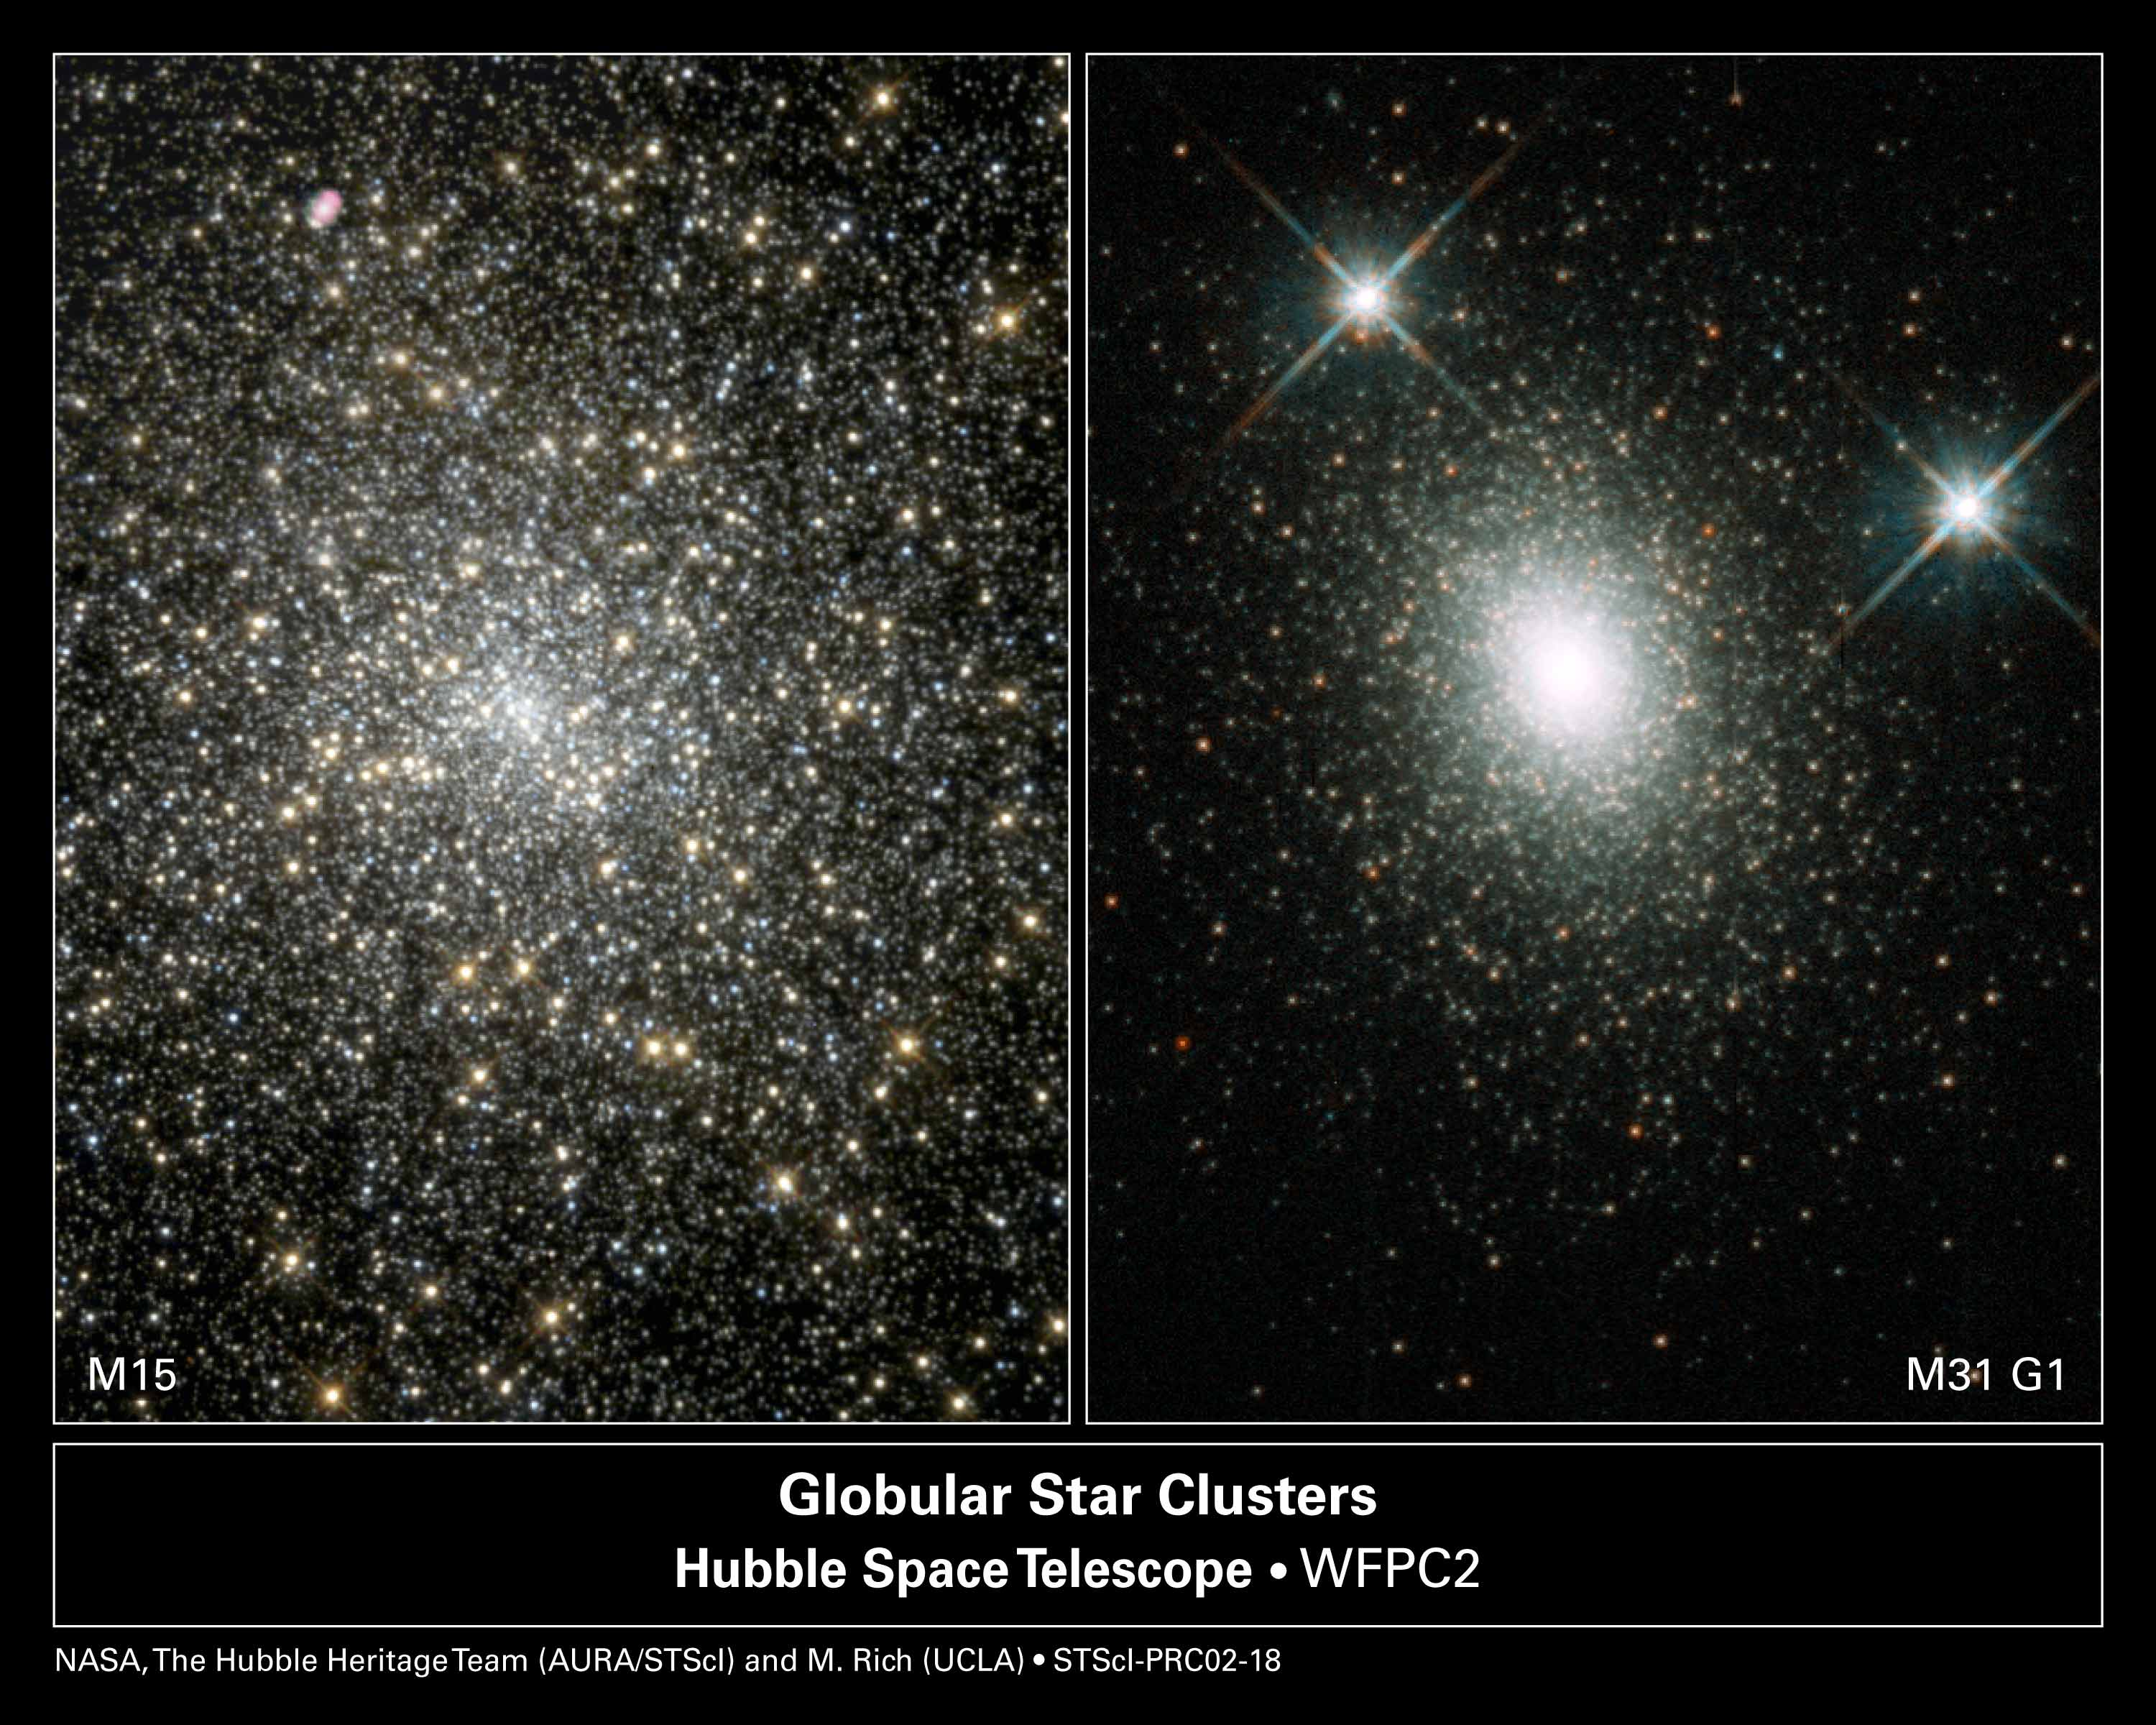

Where Did That Black Hole Come From?

Medium-size black holes actually do exist, according to the latest findings from NASA/ESA Hubble Space Telescope, but scientists had to look in some unexpected places to find them. The previously undiscovered black holes provide an important link that sheds light on the way in which black holes grow. Even more odd, these new black holes were found in the cores of glittering, 'beehive' swarms of stars called globular star clusters, which orbit our Milky Way and other galaxies. The black hole in globular cluster M15 [left] is 4, 000 times more massive than our Sun. G1 [right], a much larger globular cluster, harbors a heftier black hole, about 20, 000 times more massive than our Sun.

Credit: NASA/ESA, The Hubble Heritage Team (STScI/AURA) and Micahel Rich (UCLA)